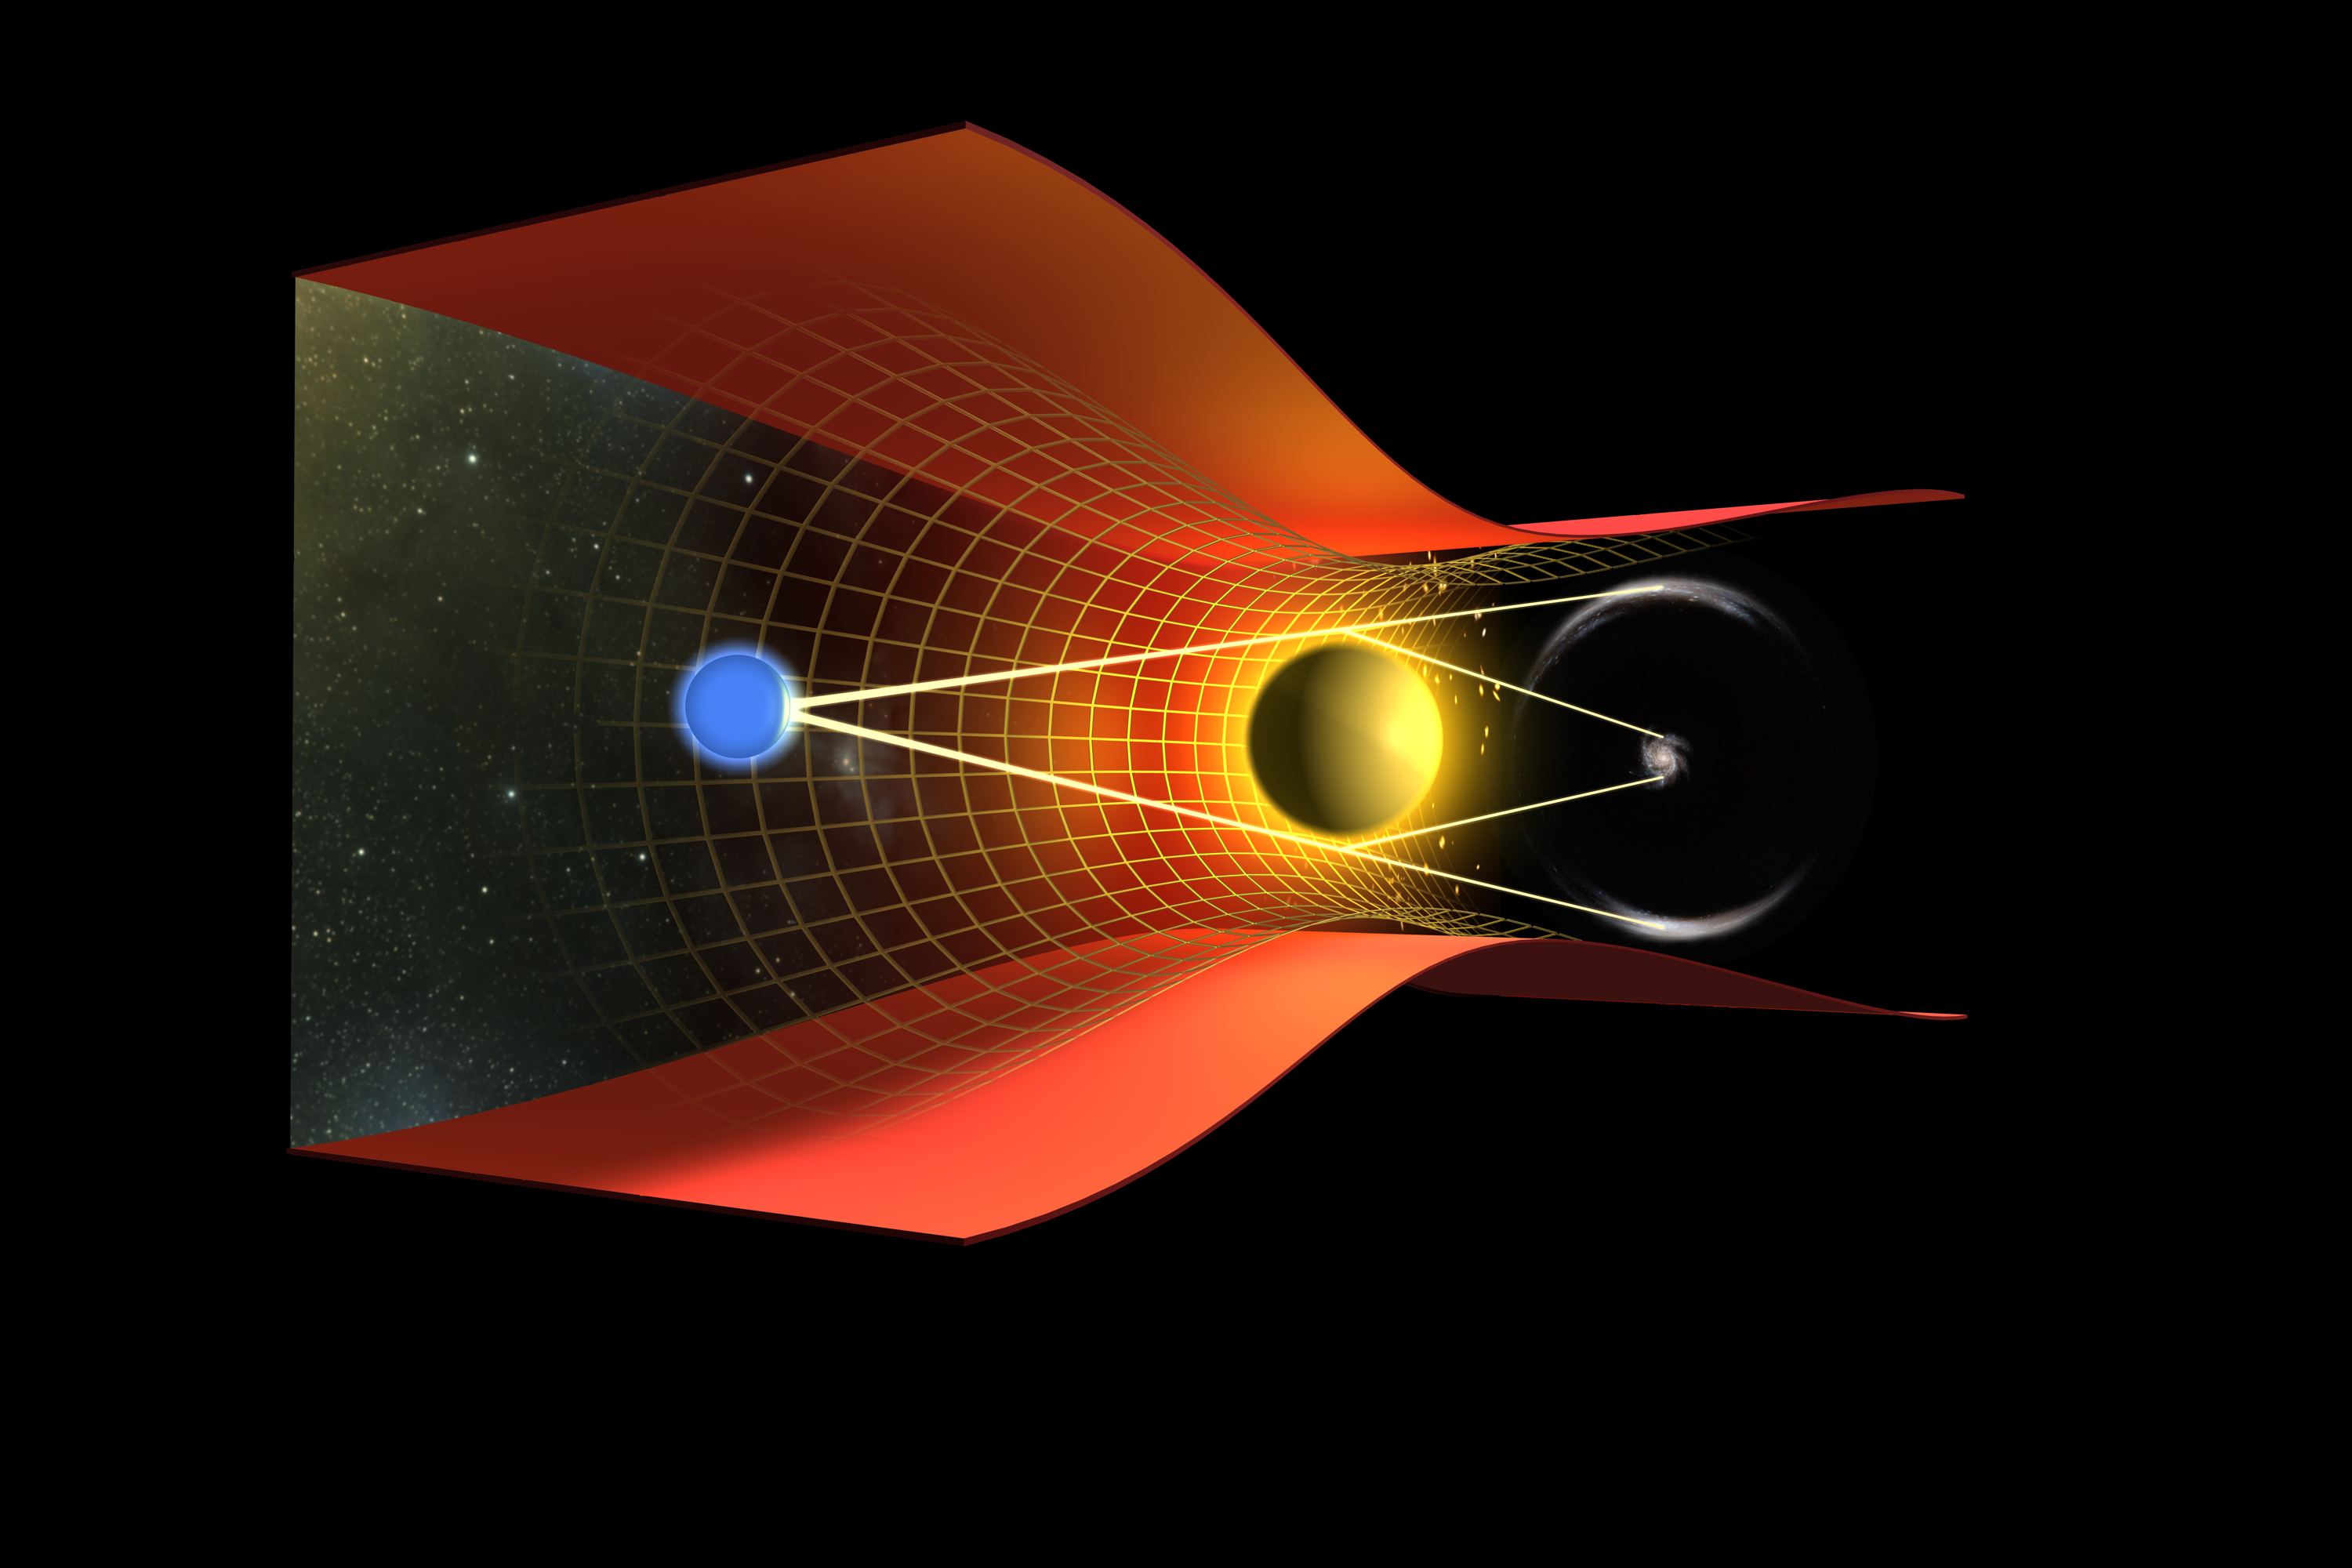

Illustration of a gravitational lensing effect

This image illustrates a gravitational lensing effect. Imagine the Earth (represented as a blue sphere on the left), a massive body (represented as a yellow sphere near the centre) and a spiral galaxy are aligned. The massive body distorts the spacetime (represented as the yellow grid) and observers on Earth, instead of seeing the spiral galaxy as it is, see the galaxy distorted, as arcs of light. It is like having a "lens" in front of the galaxy.

Credit: NASA, ESA, and Johan Richard (Caltech, USA) Acknowledgement: Davide de Martin & James Long (ESA/Hubble)